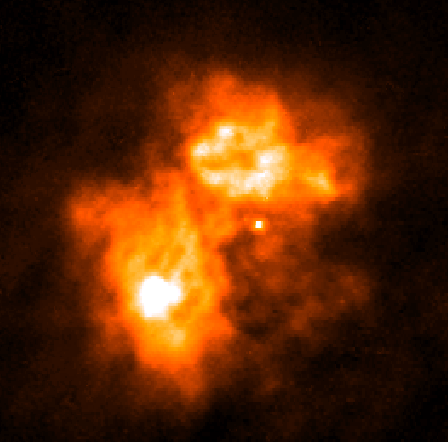

A Butterfly-Shaped 'Papillon Nebula' Yields Secrets of Massive Star Birth

A NASA/ESA Hubble Space Telescope view of a turbulent cauldron of starbirth, called N159, taking place 170, 000 light-years away in our satellite galaxy, the Large Magellanic Cloud (LMC).

Credit: M. Heydari-Malayeri (Paris Observatory) and NASA/ESA